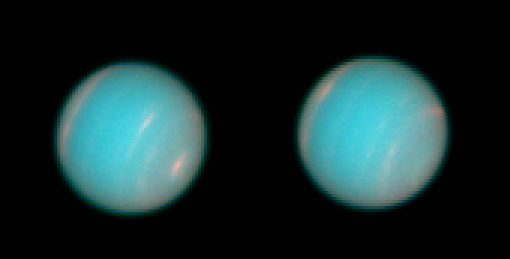

Highest Resolution of Neptune since Voyager-2 flyby

Two groups have recently used the Hubble Space Telescope (HST) Wide Field Planetary Camera 2 (WFPC 2) to acquire new high-resolution images of the planet Neptune. Members of the WFPC-2 Science Team, lead by John Trauger, acquired the first series of images on 27 through 29 June 1994.

Credit: WFPC2 Science Team